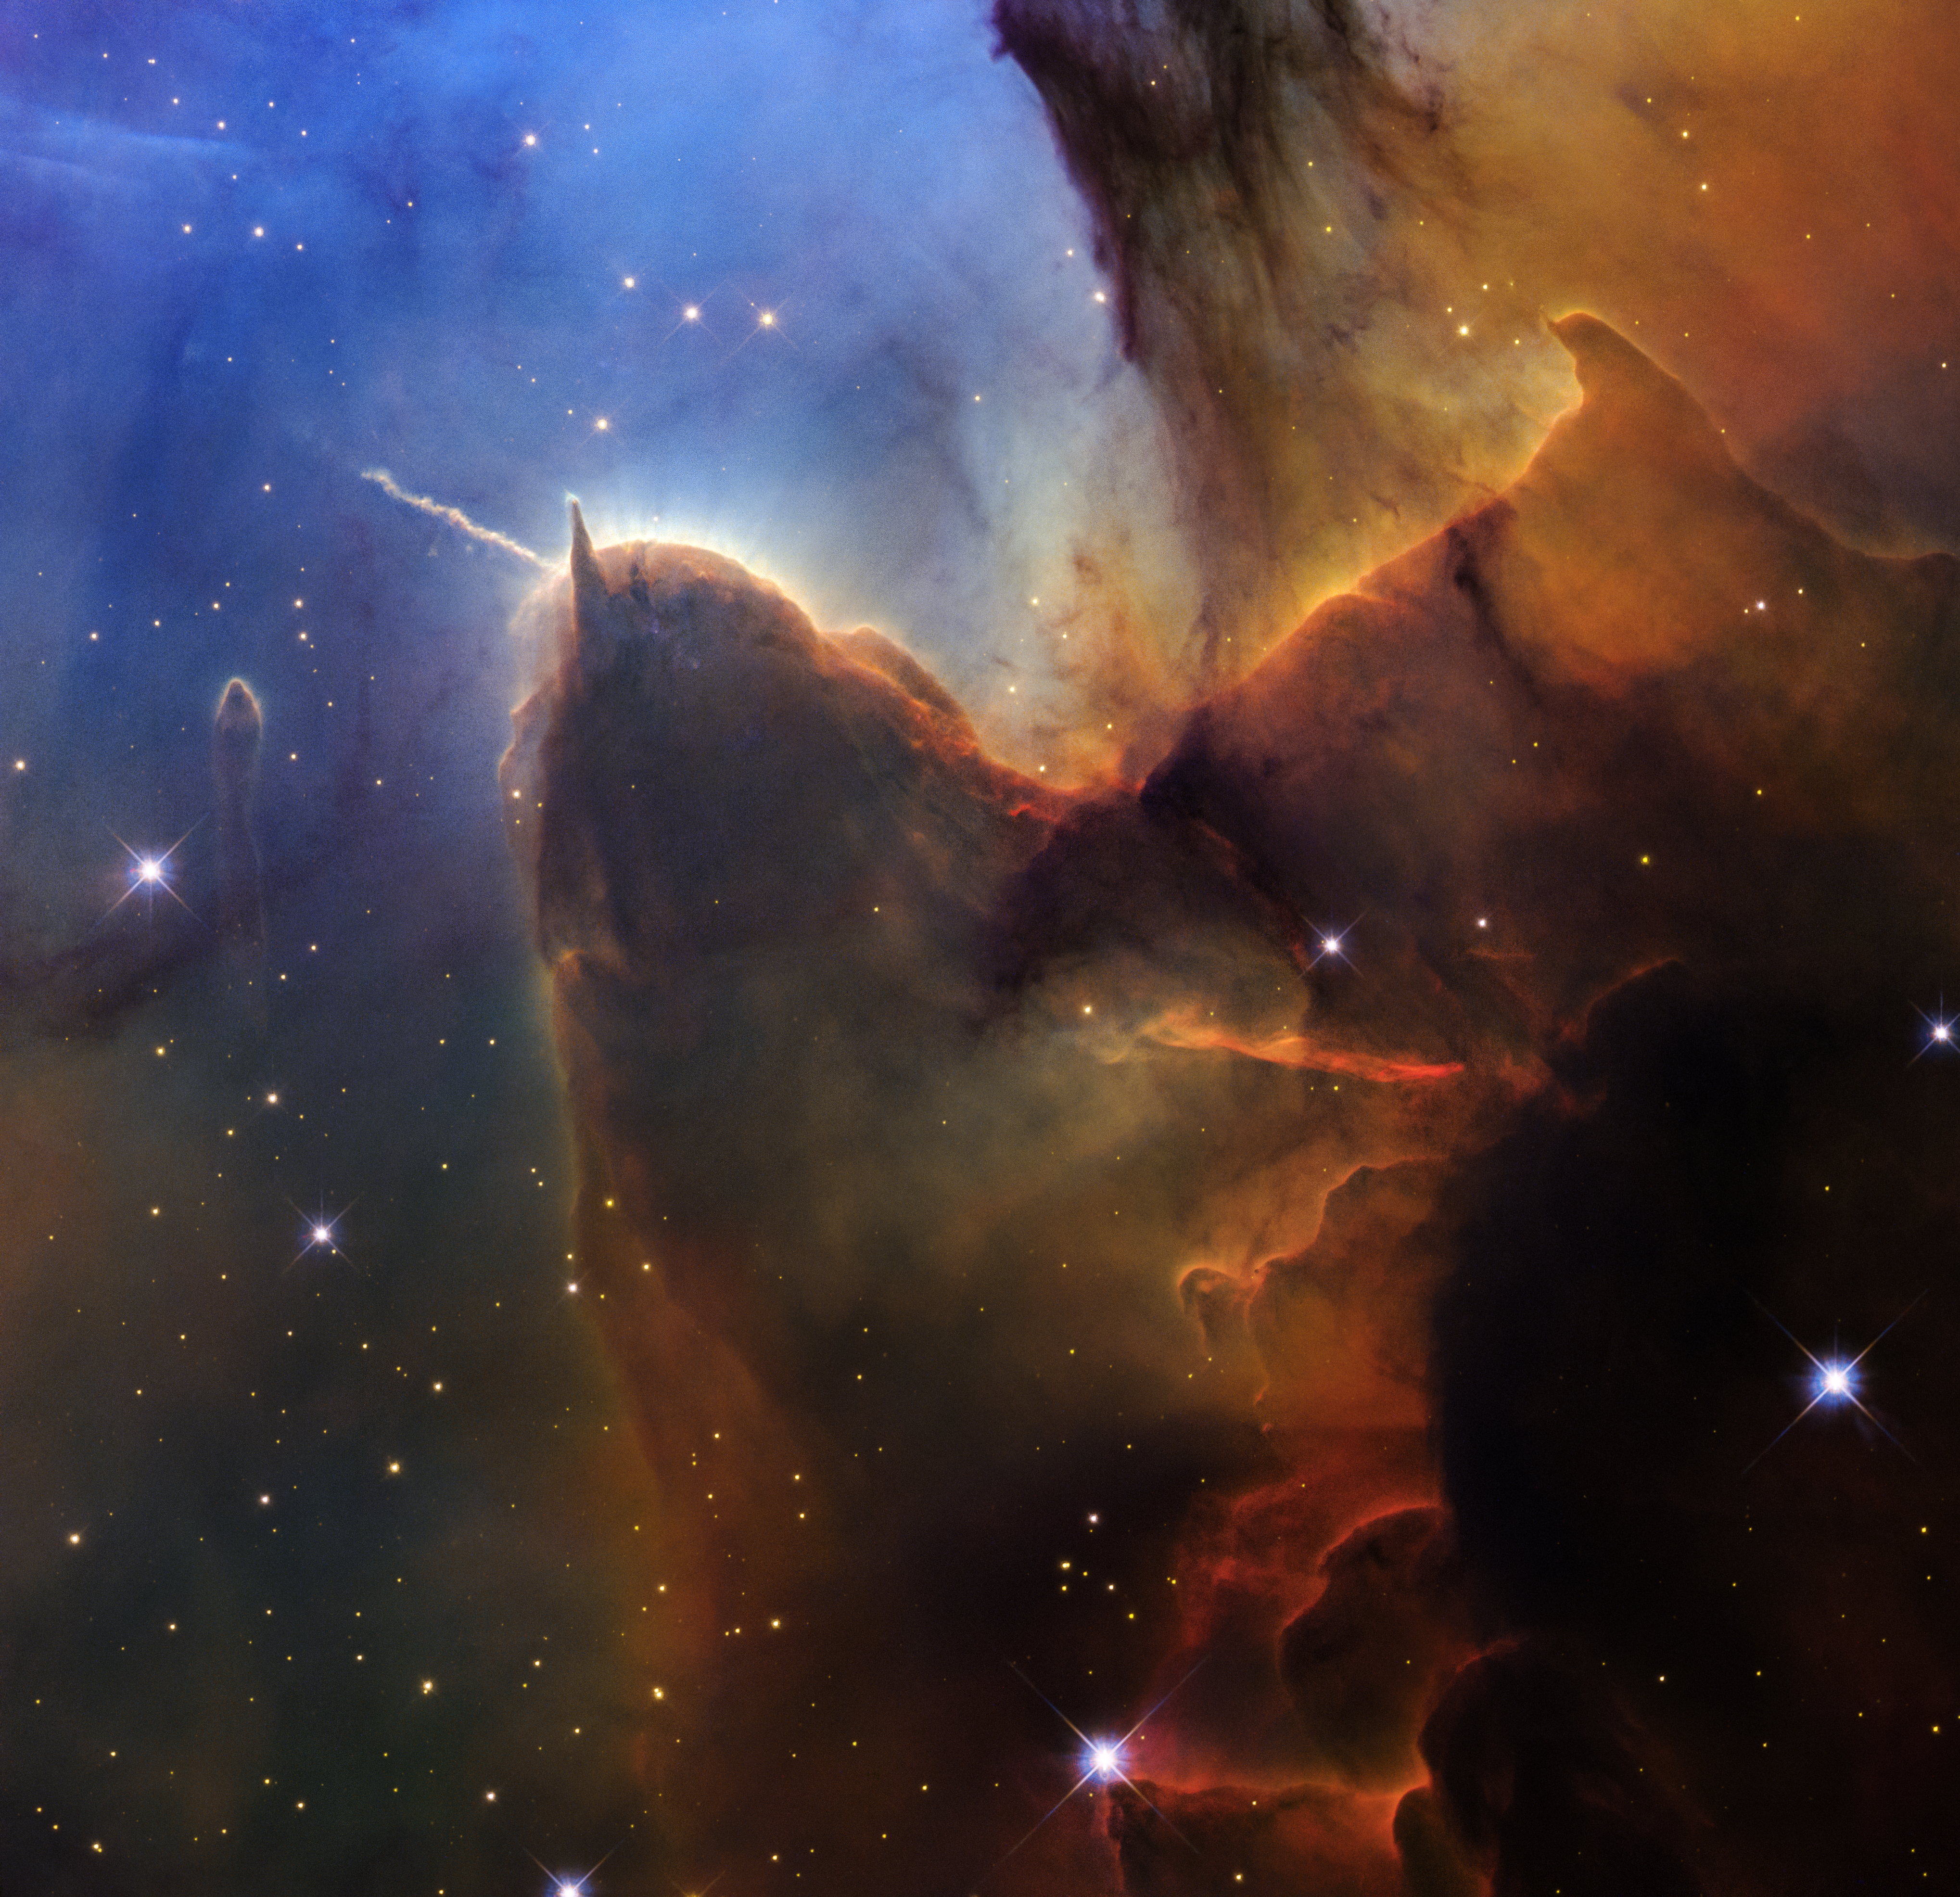

Trifid Nebula (Wide Field Camera 3 Image)

The colours in this image from the NASA/ESA Hubble Space Telescope tell a story about density in the Trifid Nebula, a star-forming region about 5000 light-years from Earth. The top left, where it is bright blue, has the smallest amount of dust. Here, powerful ultraviolet light stripped electrons from nearby gas, creating a glow, with winds creating a bubble by clearing out surrounding dust.

An example of active cloud destruction is toward the top of the head-shaped area with two “horns.” Bright yellow gas streams upward where gas and dust are being destroyed.

Thicker dust appears dark brown, like mud. In the far-right corner, which is nearly pitch black, the dust is the densest.

Fully formed stars (bright orange orbs) are scattered across the scene. Their light and stellar winds have also cleared the immediate areas around them.

Over millions of years, the gas and dust that make up this nebula (also known as Messier 20 or M20) will disappear and only stars will remain.

Credit: NASA, ESA, STScI. Image processing: J. DePasquale (STScI)